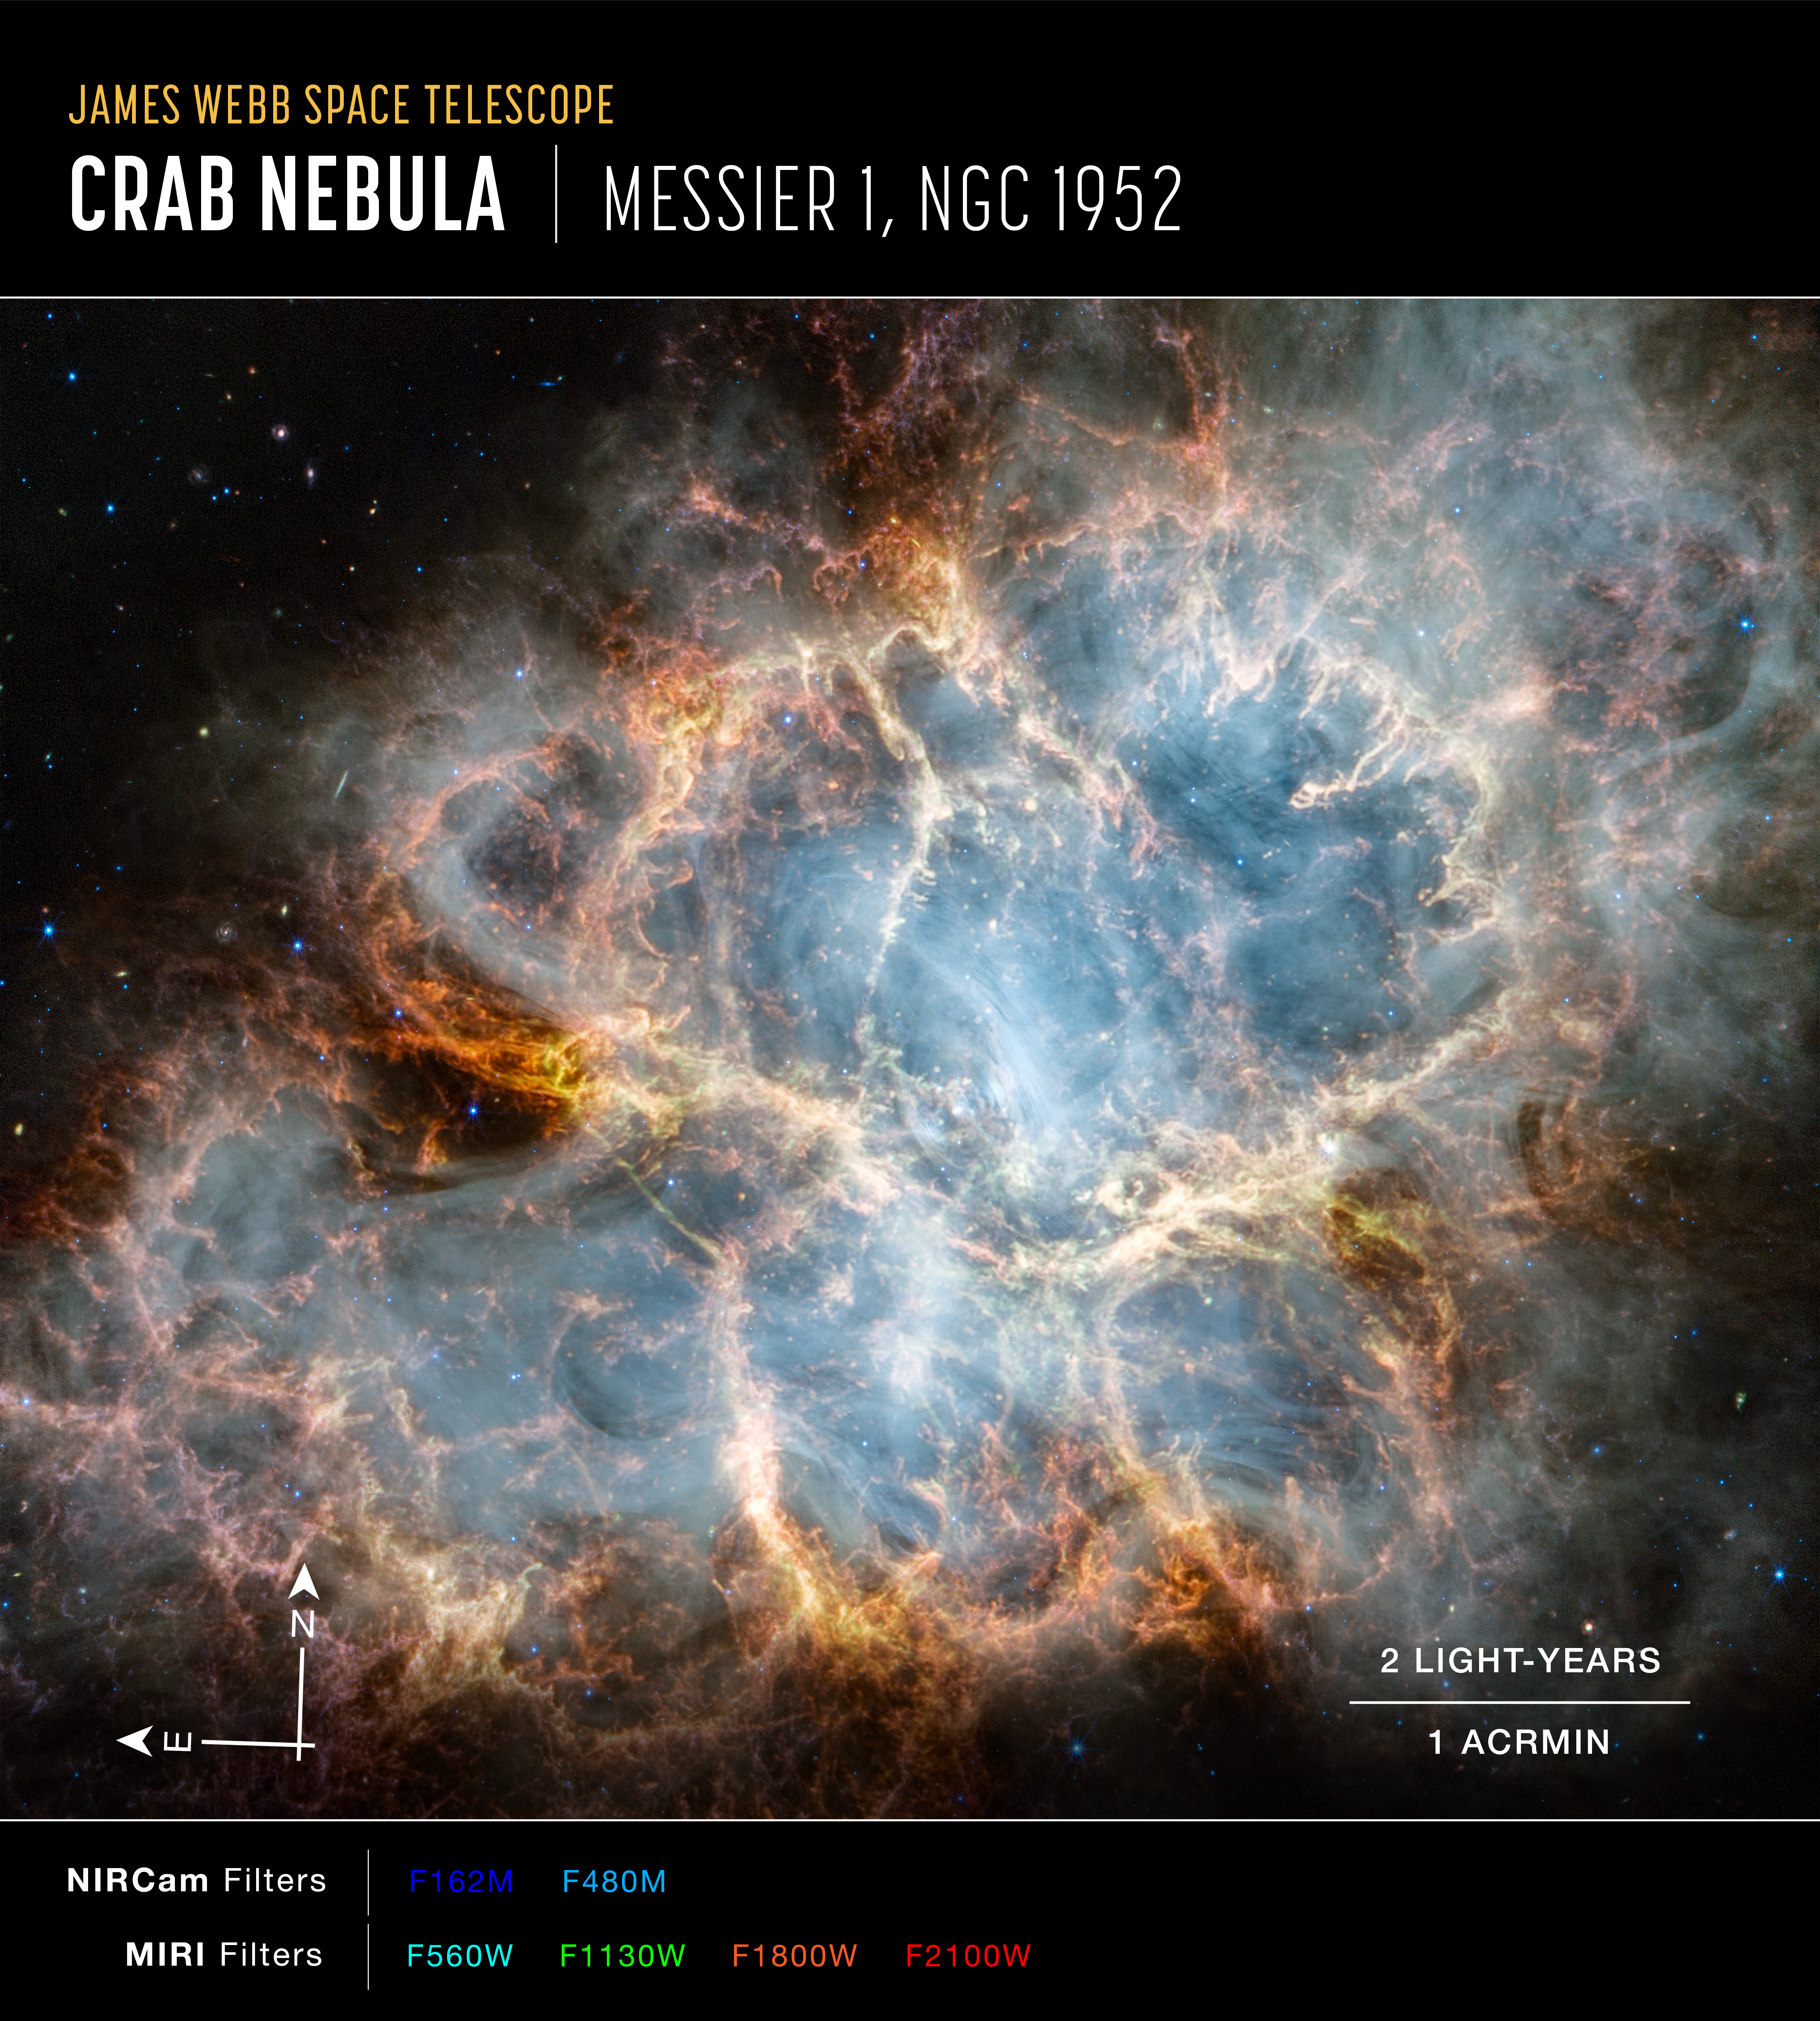

The Crab Nebula (annotated)

The NASA/ESA/CSA James Webb Space Telescope has gazed at the Crab Nebula in the search for answers about the supernova remnant’s origins. Webb’s NIRCam (Near-Infrared Camera) and MIRI (Mid-Infrared Instrument) have revealed new details in infrared light.

Similar to the Hubble optical wavelength image released in 2005, with Webb the remnant appears to consist of a crisp, cage-like structure of fluffy red-orange filaments of gas that trace doubly ionised sulphur (sulphur III). Within the remnant’s interior, yellow-white and green fluffy ridges form large-scale loop-like structures, which represent areas where dust particles reside.

The area is composed of translucent, milky material. This material is emitting synchrotron radiation, which is emitted across the electromagnetic spectrum but becomes particularly vibrant thanks to Webb’s sensitivity and spatial resolution. It is generated by particles accelerated to extremely high speeds as they wind around magnetic field lines. The the synchrotron radiation can be traced throughout the majority of the Crab Nebula’s interior.

Locate the wisps that follow a ripple-like pattern in the middle. In the centre of this ring-like structure is a bright white dot: a rapidly rotating neutron star. Further out from the core, follow the thin white ribbons of the radiation. The curvy wisps are closely grouped together, following different directions that mimic the structure of the pulsar’s magnetic field. Note how certain gas filaments are bluer in colour. These areas contain singly ionised iron (iron II).

Credit: NASA, ESA, CSA, STScI, T. Temim (Princeton University)